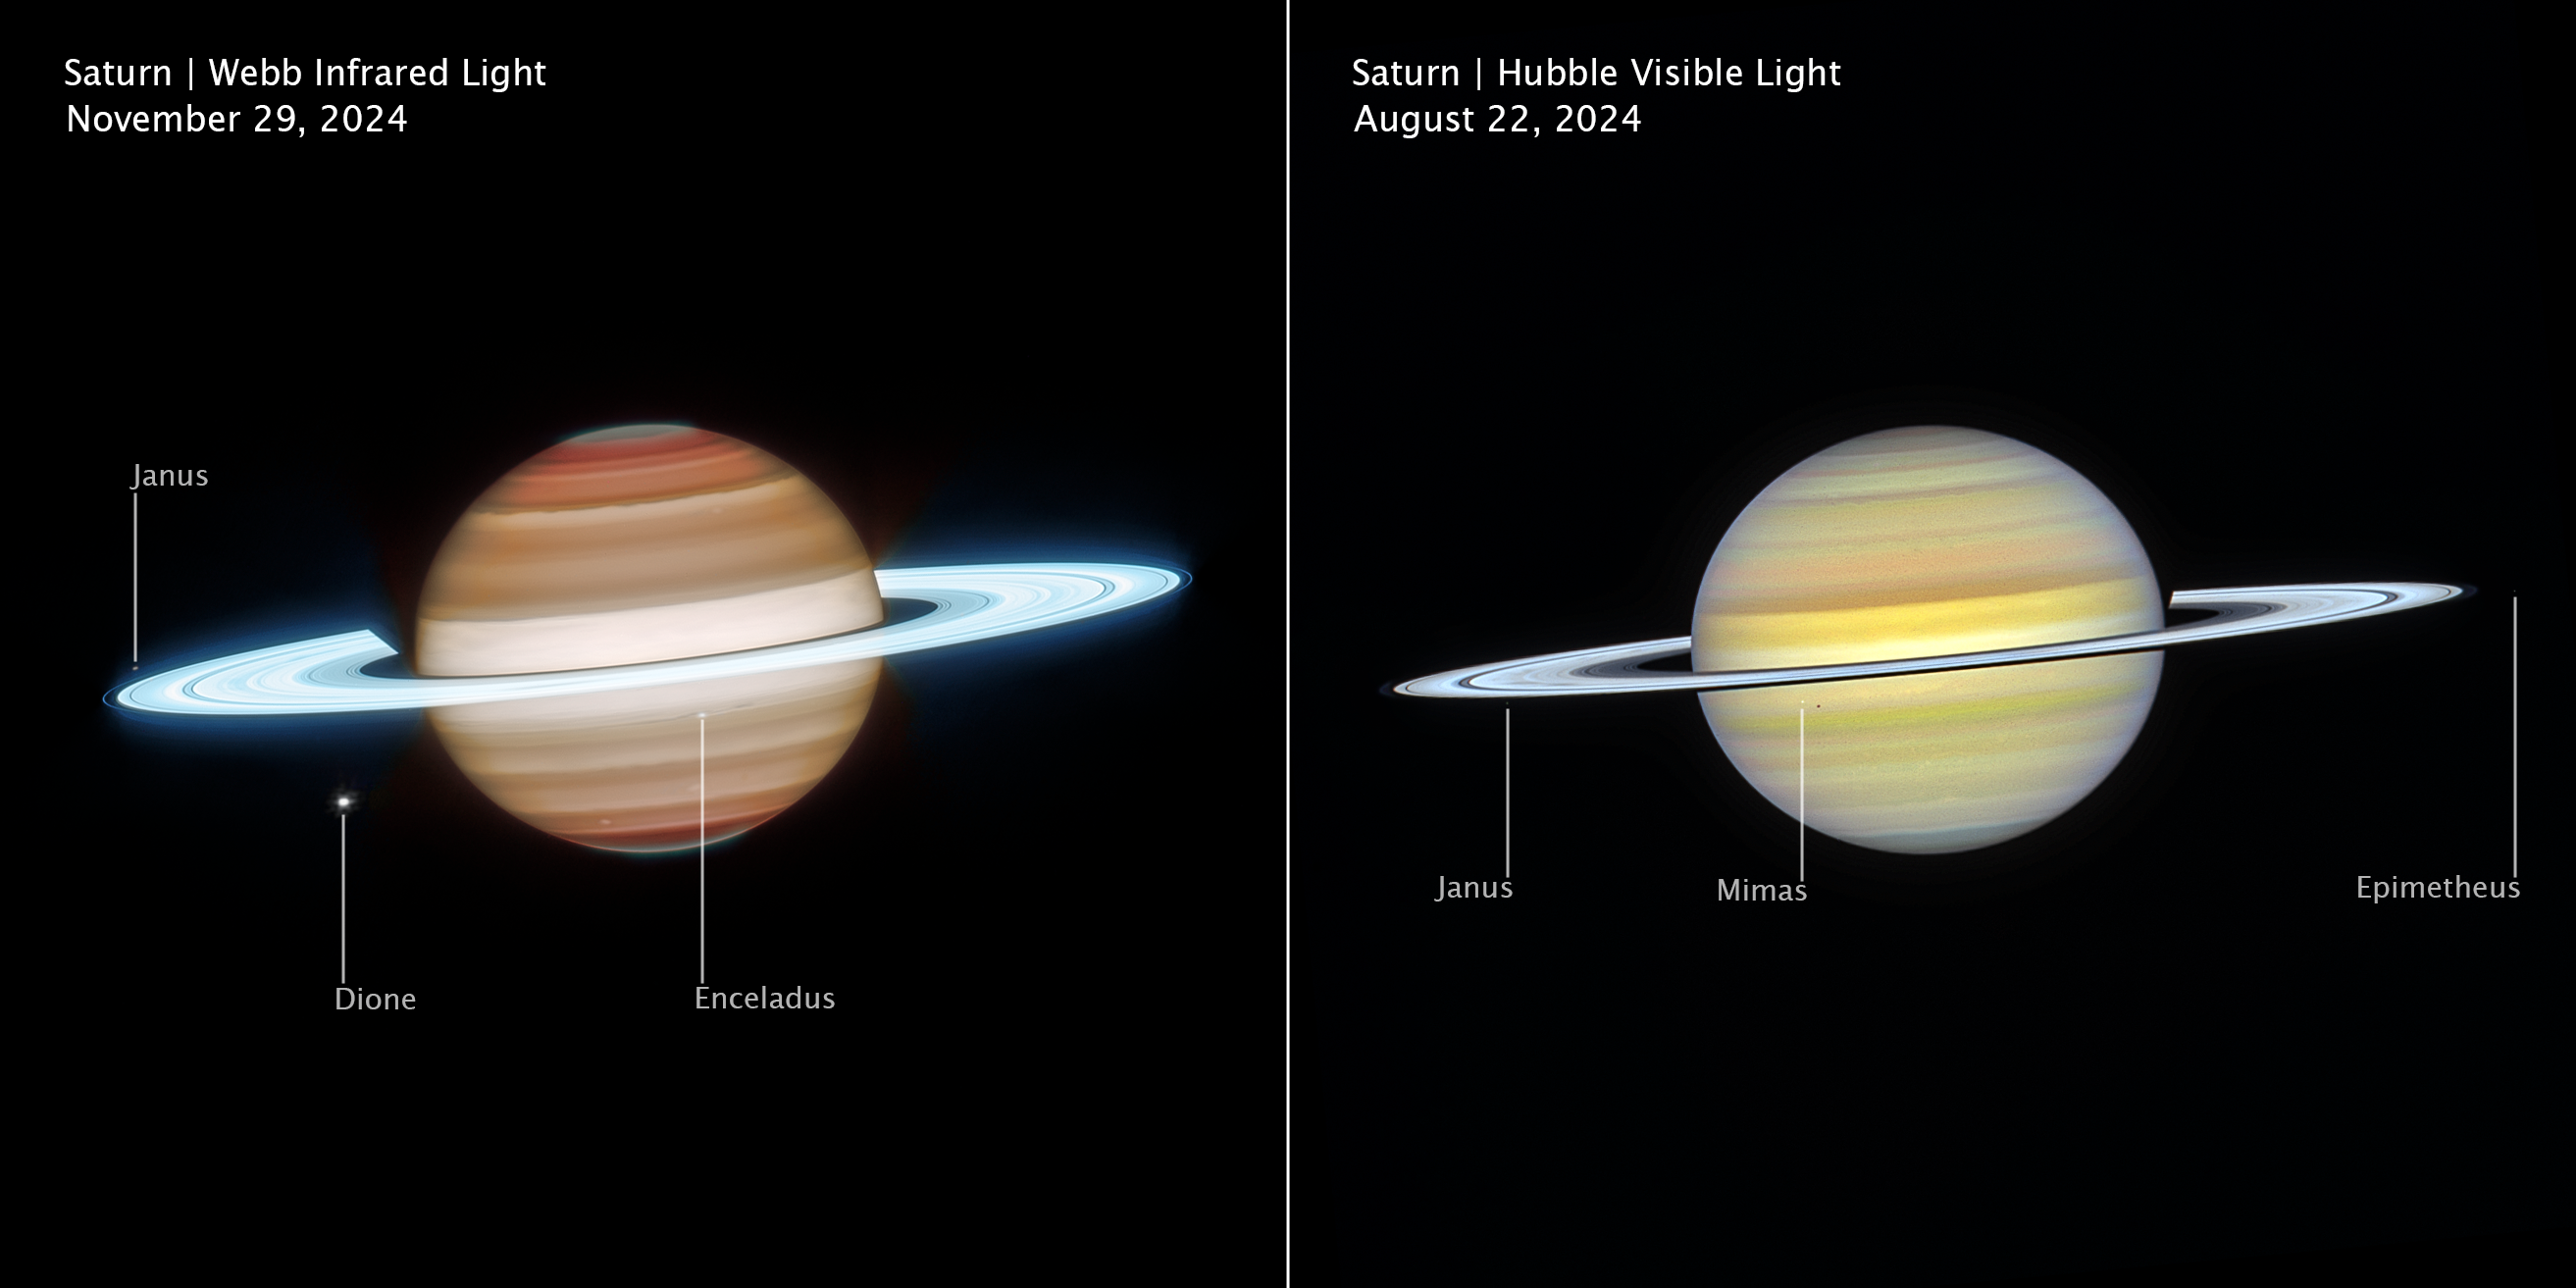

Saturn (2024 Webb and Hubble images, annotated)

Side-by-side views of Saturn from the NASA/ESA/CSA James Webb Space Telescope (left) and the NASA/ESA Hubble Space Telescope (right) reveal the planet in infrared and visible light. Hubble highlights subtle cloud banding and colour variations, while Webb’s infrared vision probes different atmospheric layers, bringing out storms, waves, and glowing ring structures in striking detail.

Credit: NASA, ESA, CSA, STScI, A. Simon (NASA-GSFC), M. Wong (University of California); Image Processing: J. DePasquale (STScI)